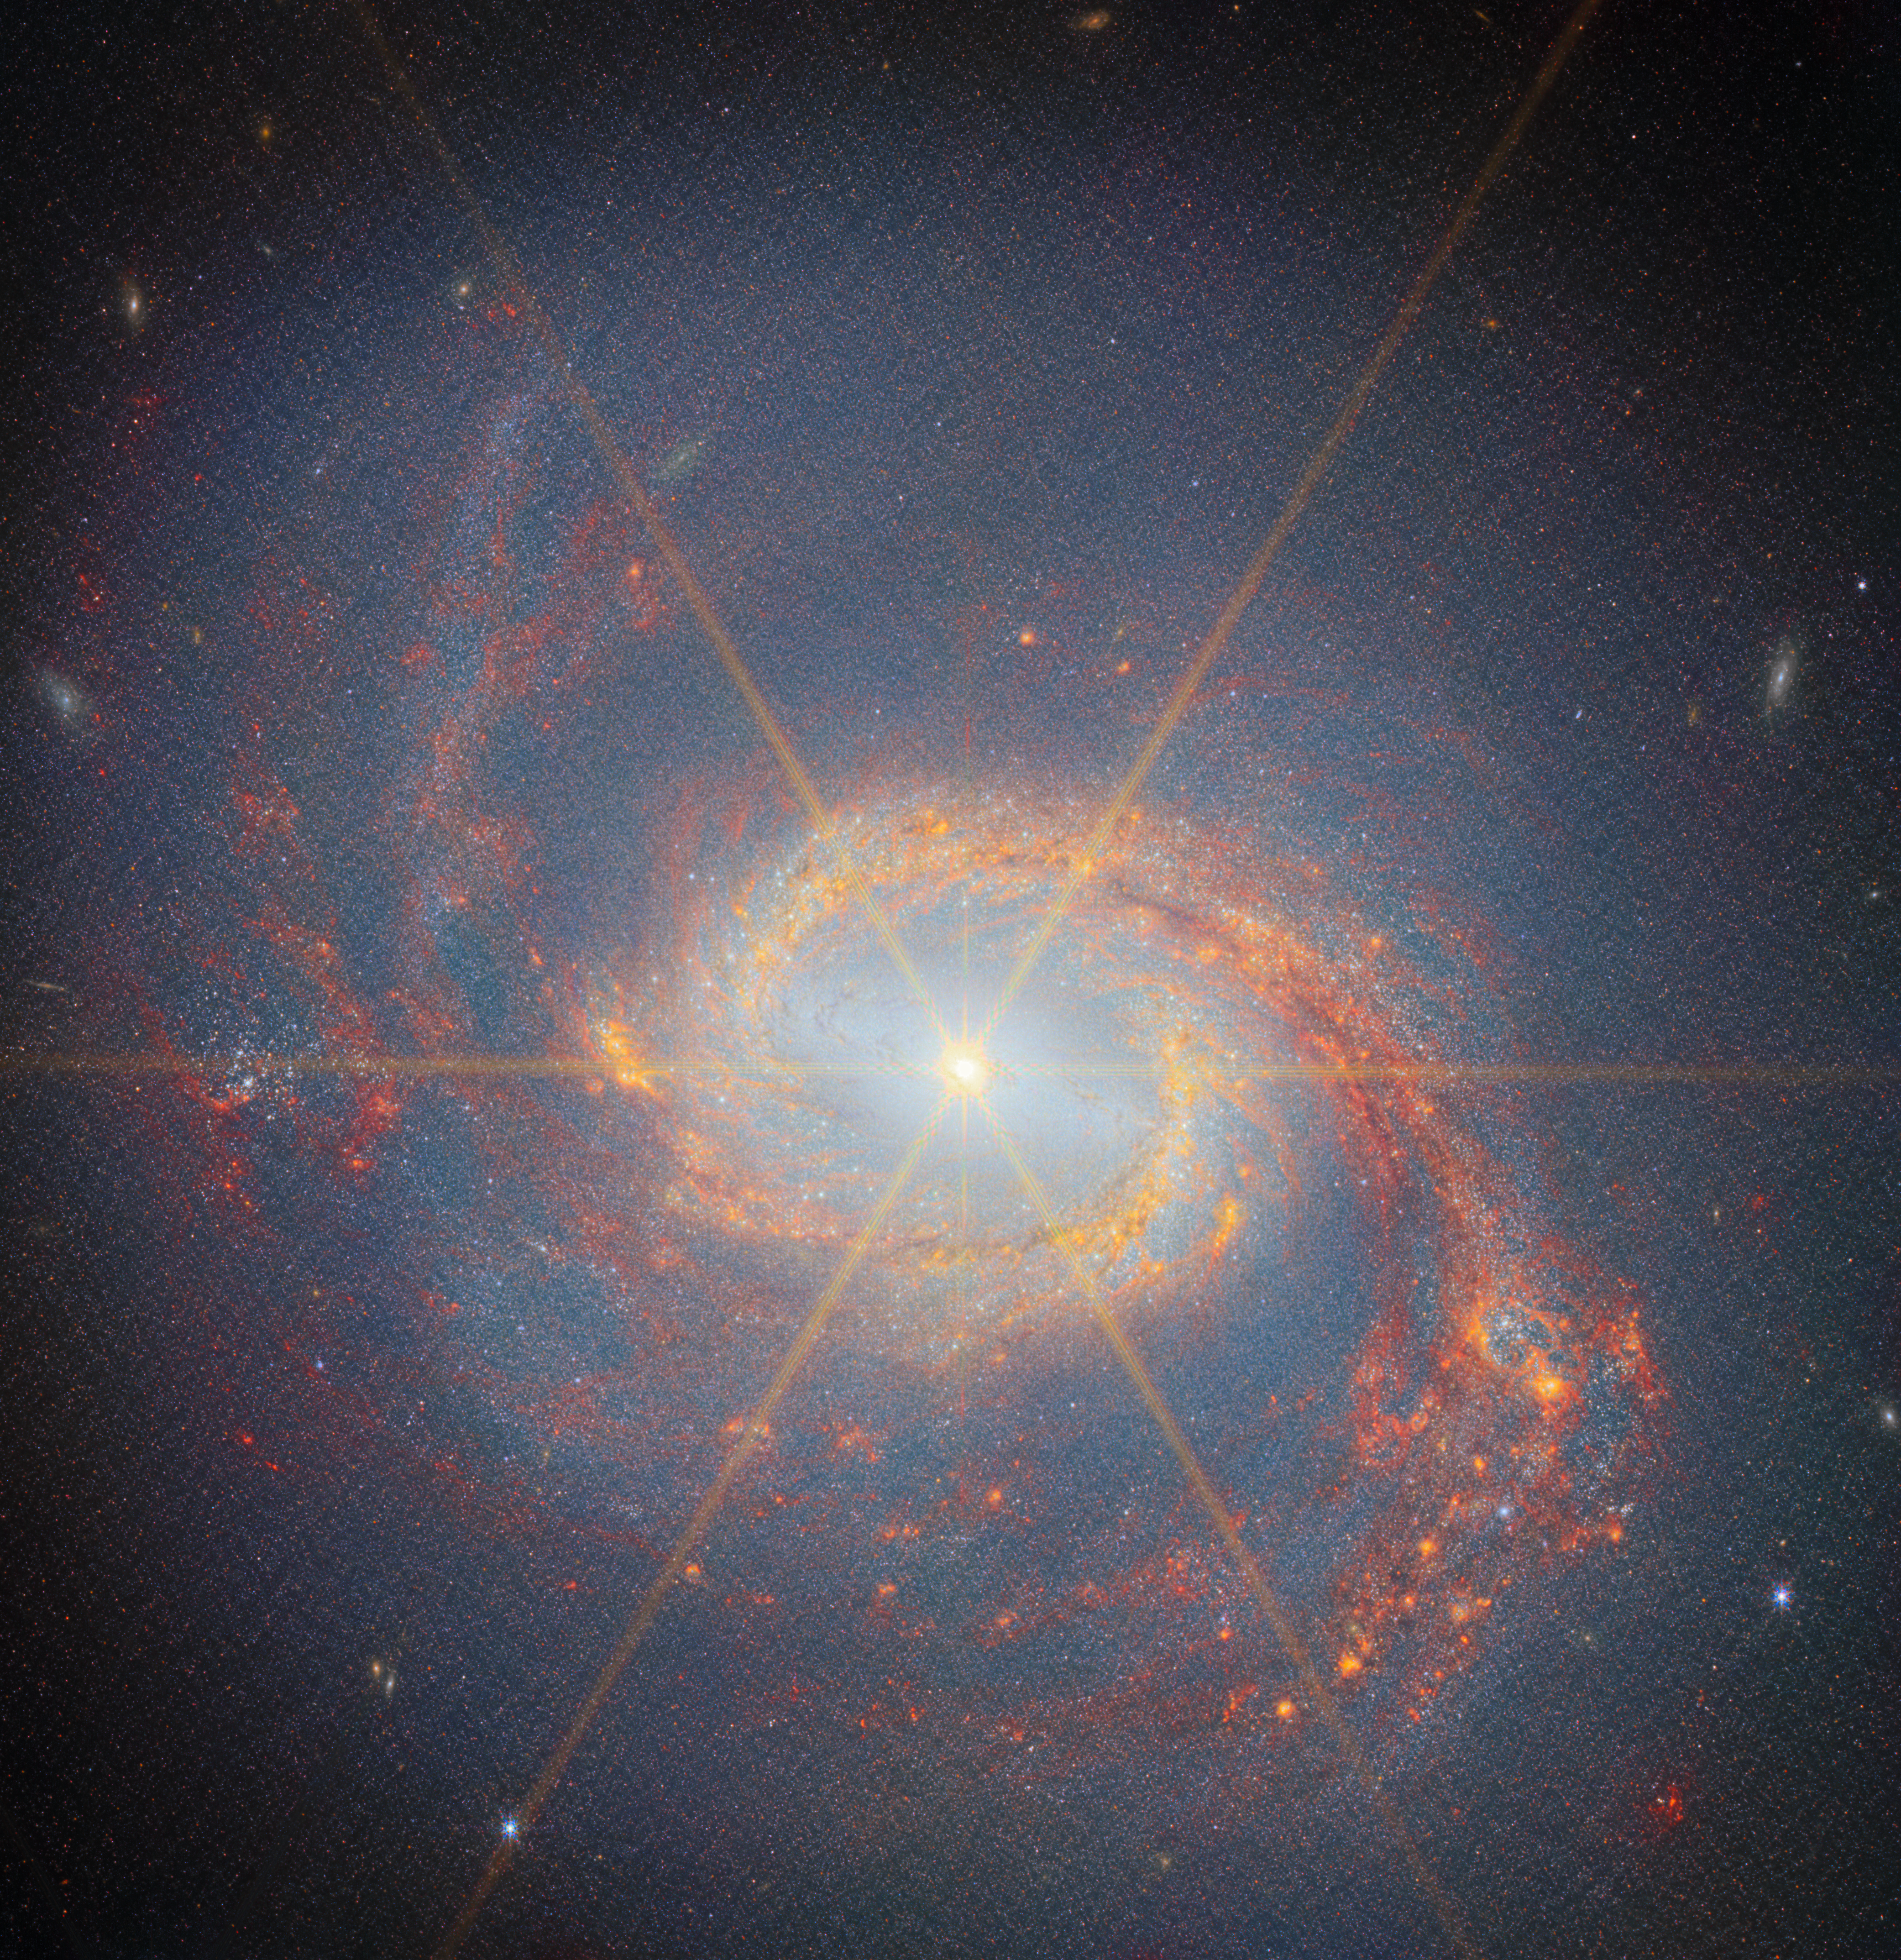

Messier 77 (NIRCam)

This latest Picture of the Month from the NASA/ESA/CSA James Webb Space Telescope features Messier 77 (M77), a barred spiral galaxy famous and appreciated among astronomers for its combination of relative proximity and spectacular features to study. It is located 45 million light-years away in the constellation Cetus (The Whale). This new image, from Webb’s Near-Infrared Camera (NIRCam), highlights its swirling spiral arms, the dust in its disc and its piercingly bright core like never before.

At the heart of M77 is a compact region filled with hot gas that handily outshines the rest of the galaxy put together, even overcoming the light-gathering capacity of Webb’s cameras. This is an active galactic nucleus (AGN), and it’s powered by M77’s central supermassive black hole, which is eight million times as massive as our Sun. Gas in the galaxy’s central regions is pulled by the strong gravity into a tight and rapid orbit around the black hole, where it crashes together and heats up, releasing tremendous amounts of radiation. The starburst pattern radiating from M77’s centre is diffraction spikes that are a feature of the telescope’s optics. They are most often seen from stars, but the bright and compact AGN creates some in this image too.

The bright AGN lies within a larger structure that is uniquely highlighted by Webb’s NIRCam. Since its discovery in 1780, M77 has been variously identified as a nebula (before the concept of separate galaxies beyond our own), a star cluster, and an ordinary spiral galaxy. But near-infrared images reveal a bar spanning from the inner end of one spiral arm to the other, a bar which doesn’t appear in visible-light images of the galaxy. Bars in galaxies channel vast amounts of star-forming material through a dense central region, and indeed M77 is an extremely prolific star-forming galaxy thanks to this bar, spawning tens of Suns worth of new stars every year!

Beyond the bar, M77’s spiral arms spin lazily out into the disc of the galaxy and beyond. The arms are the location of much of this new star birth, with dense clumps of gas collapsing to form tightly-packed clusters of stars. NIRCam pinpoints the light from these stars along the spiral arms, as well as capturing the glow that suffuses the galaxy from the billions of stars in its disc. Particularly along the southern spiral arm, NIRCam also traces infrared emission at slightly longer wavelengths — shown here in red colours — from complex molecules including polycyclic aromatic hydrocarbons (PAHs).

The data used to create this image are from an observing programme (#3707) that surveyed massive, nearby, star-forming galaxies to create a rich dataset useful for many scientific investigations. As can be seen here, the stunning resolution of Webb’s instruments reveals star clusters and rich reservoirs of gas, which can be used to explore the cycle of star formation, life and death in these and other galaxies.

Credit: ESA/Webb, NASA & CSA, A. Leroy